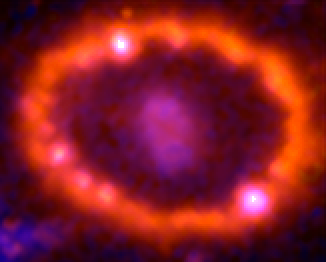

Supernova 1987A: March 23, 2001

This Hubble telescope image shows the supernova's triple-ring system, including the bright spots along the inner ring of gas surrounding the exploded star. A shock wave of material unleashed by the stellar blast is slamming into regions along the inner ring, heating them up, and causing them to glow. The ring, about a light-year across, was probably shed by the star about 20 000 years before it exploded.

Credit: NASA, ESA, and R. Kirshner (Harvard-Smithsonian Center for Astrophysics)